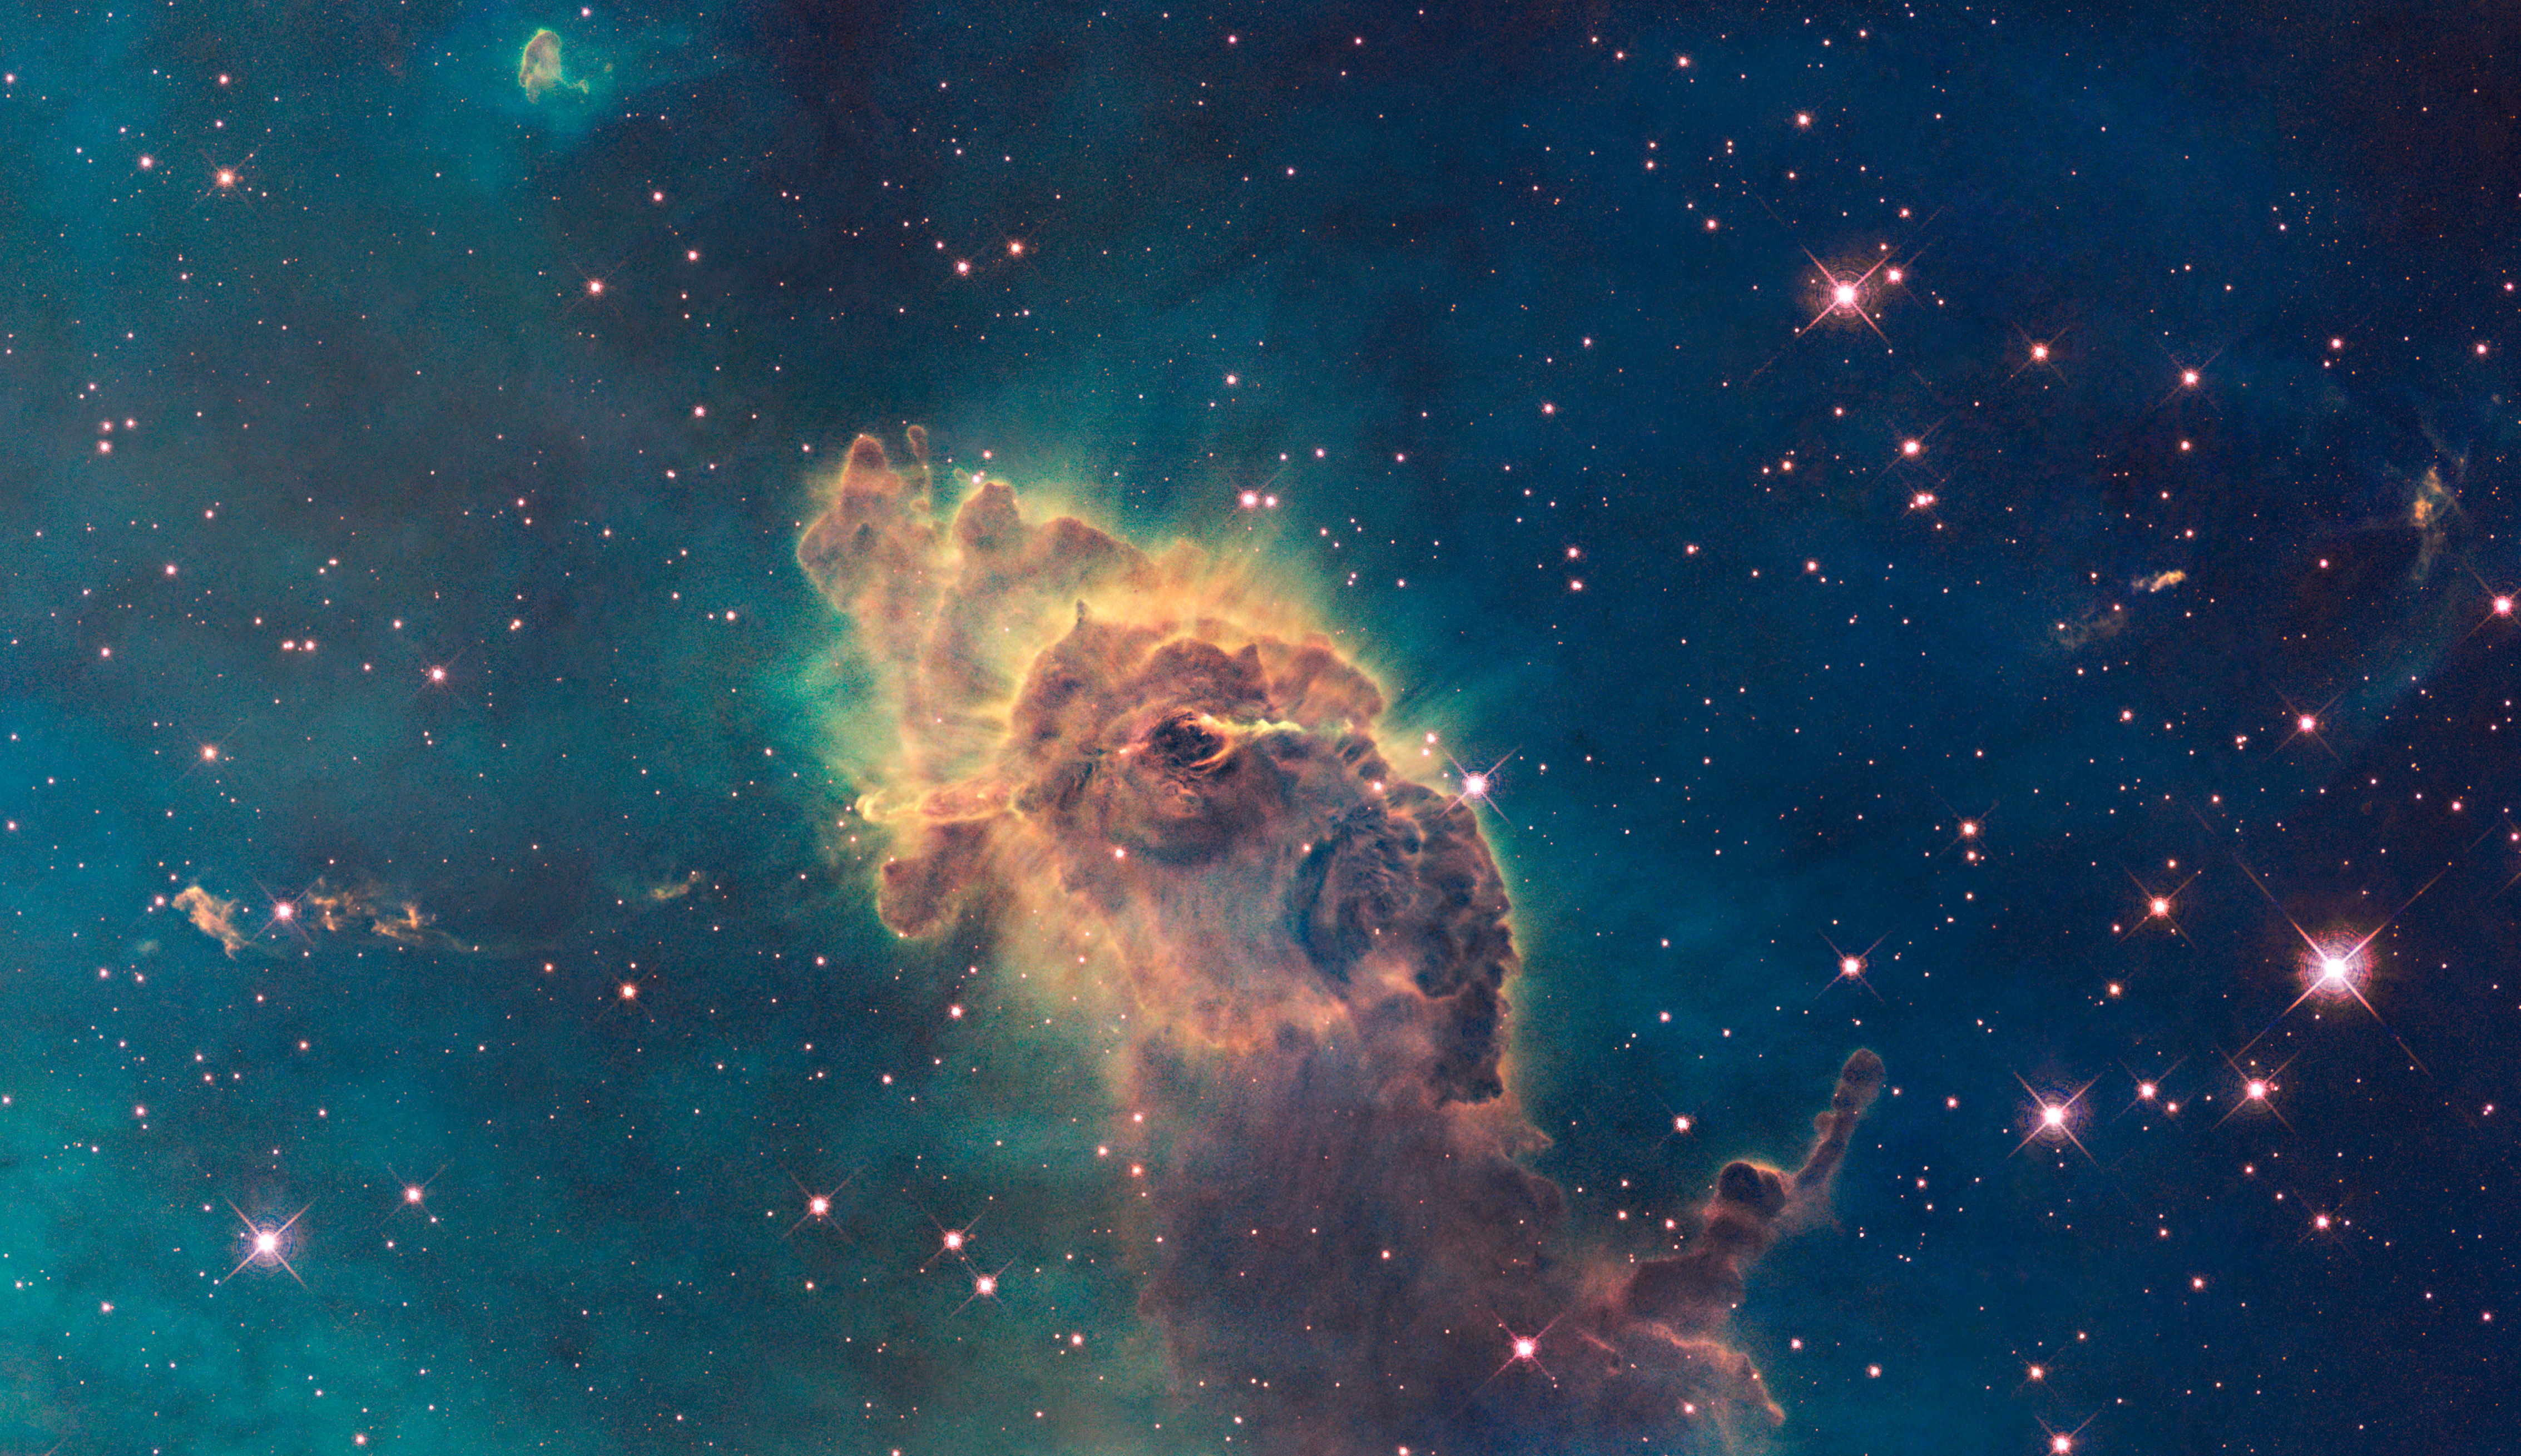

WFC3 visible image of the Carina Nebula

Composed of gas and dust, the pictured pillar resides in a tempestuous stellar nursery called the Carina Nebula, located 7500 light-years away in the southern constellation of Carina.

Taken in visible light, the image shows the tip of the three-light-year-long pillar, bathed in the glow of light from hot, massive stars off the top of the image. Scorching radiation and fast winds (streams of charged particles) from these stars are sculpting the pillar and causing new stars to form within it. Streamers of gas and dust can be seen flowing off the top of the structure.

Hubble's Wide Field Camera 3 observed the Carina Nebula on 24-30 July 2009. WFC3 was installed aboard Hubble in May 2009 during Servicing Mission 4. The composite image was made from filters that isolate emission from iron, magnesium, oxygen, hydrogen and sulphur.

These Hubble observations of the Carina Nebula are part of the Hubble Servicing Mission 4 Early Release Observations.

Credit: NASA, ESA and the Hubble SM4 ERO Team